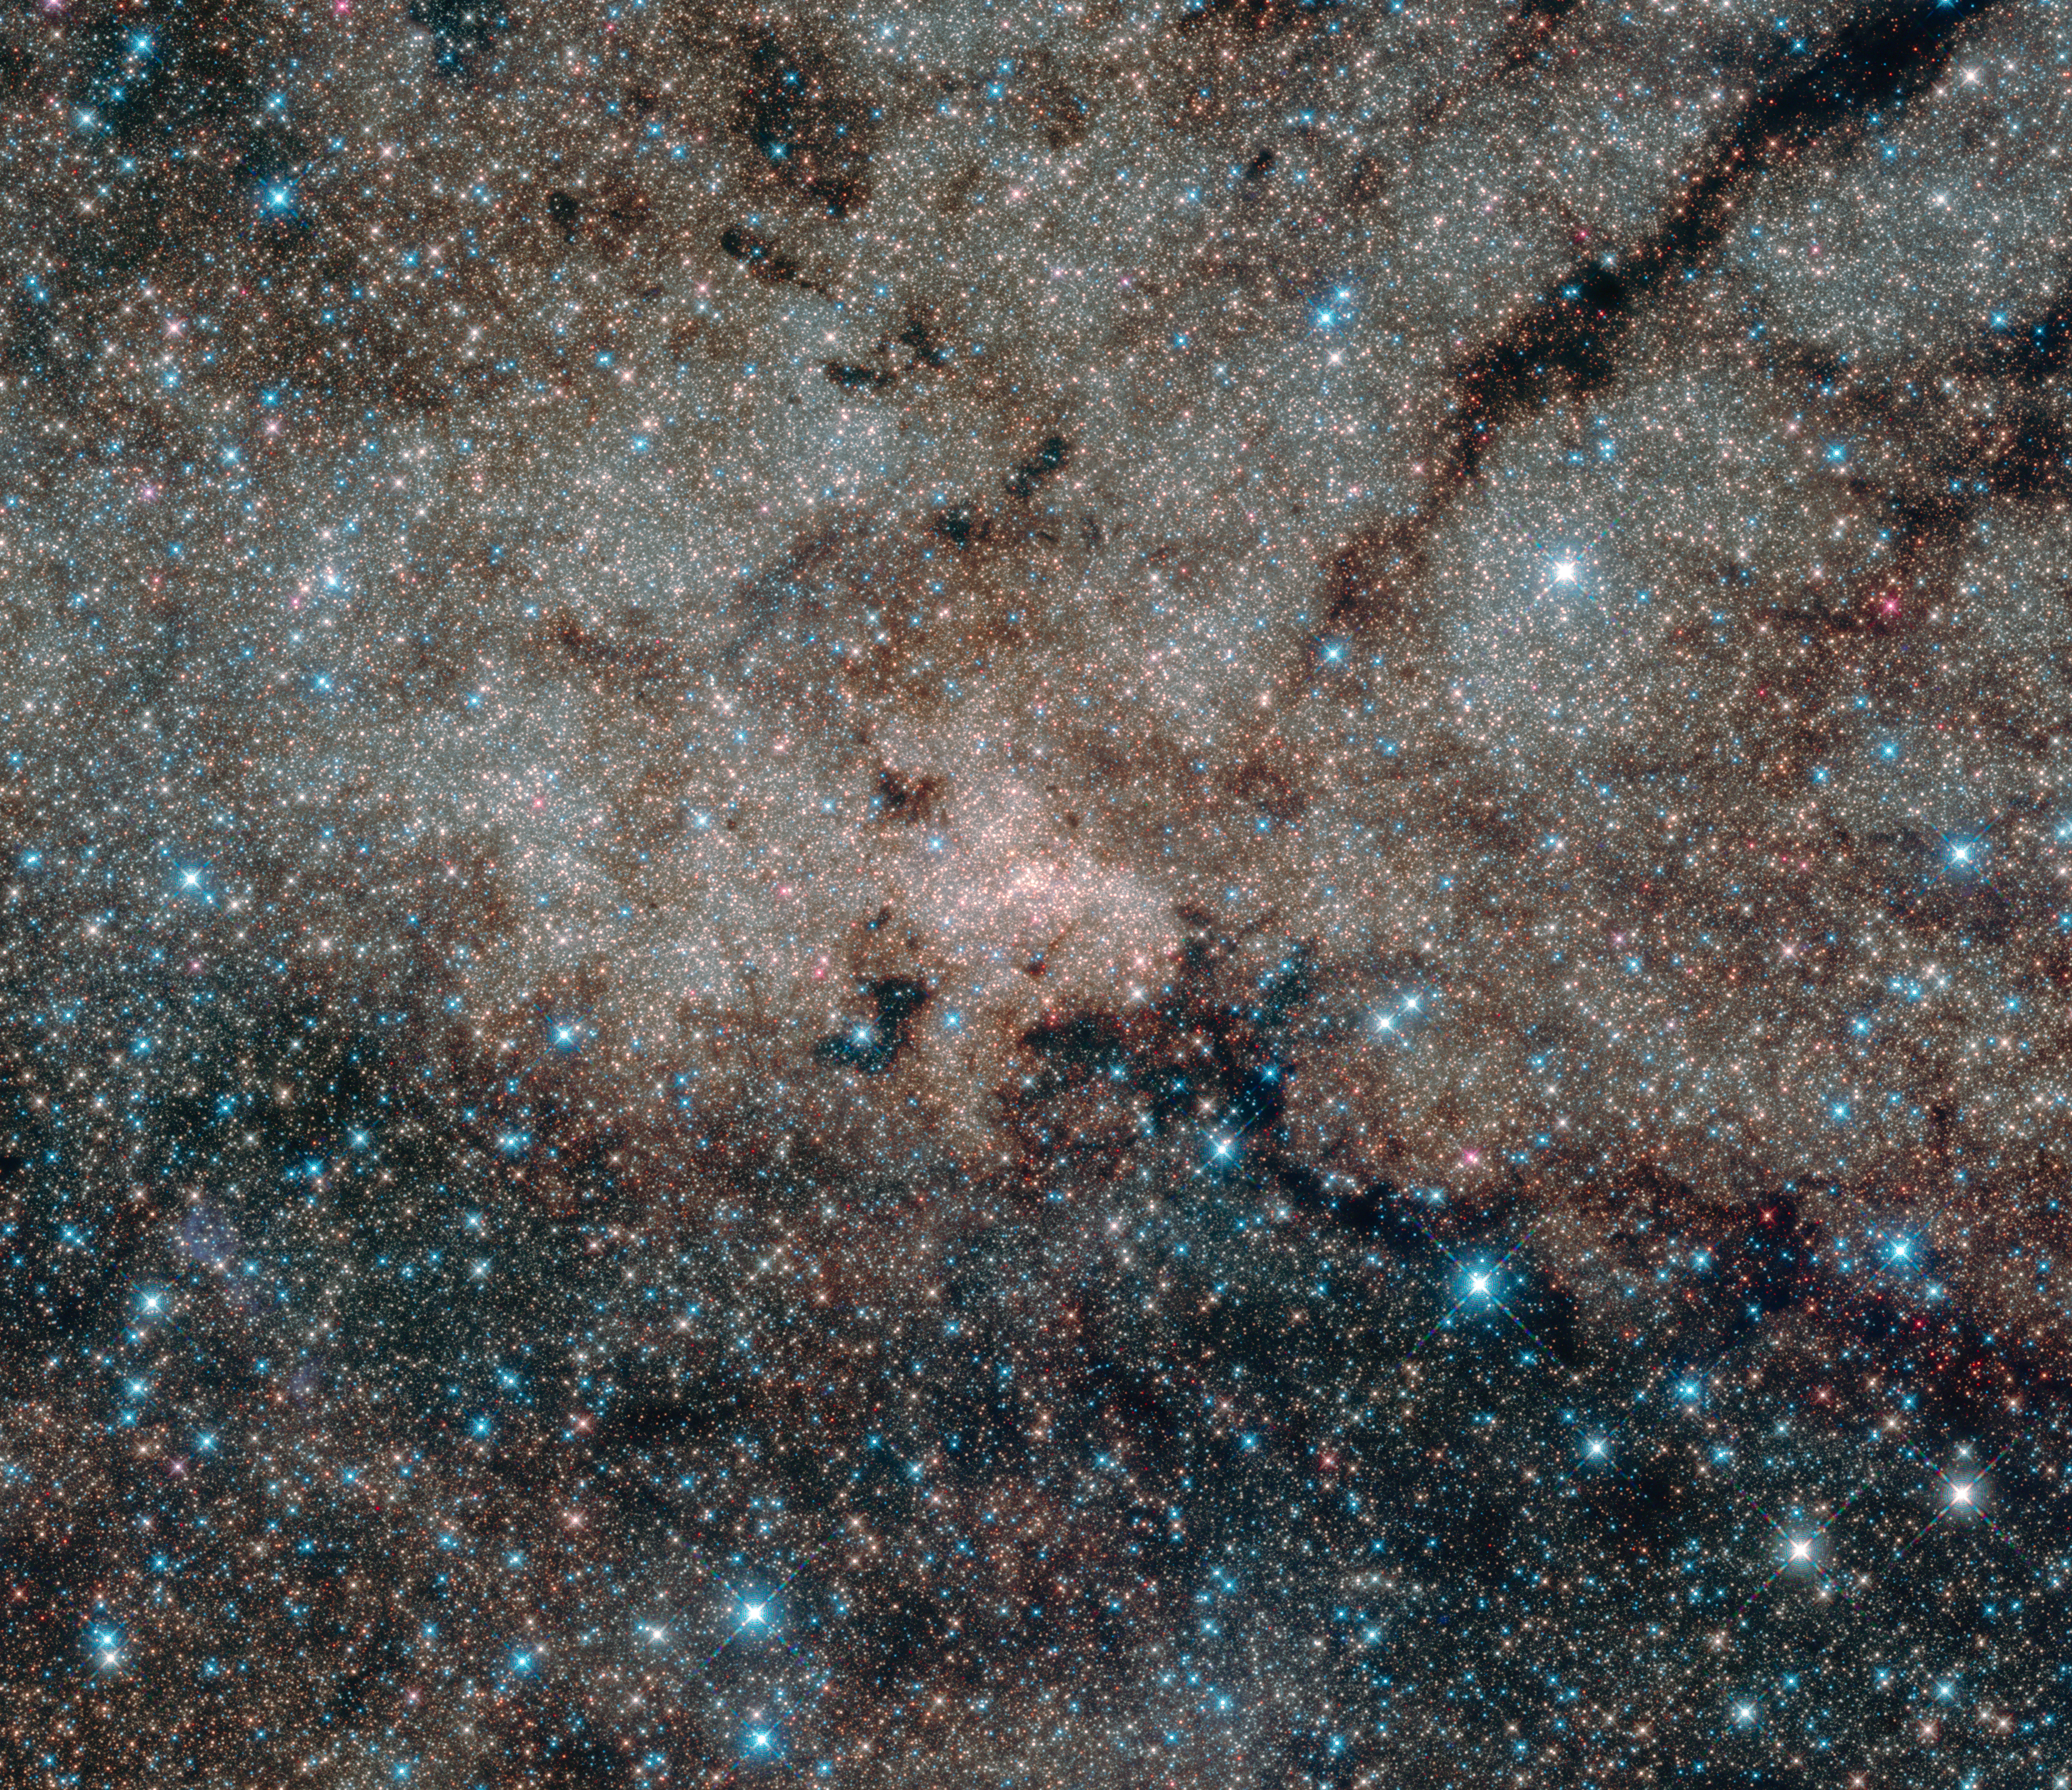

The galactic centre

This infrared image from the NASA/ESA Hubble Space Telescope shows the centre of the Milky Way, 27 000 light-years away from Earth. Using the infrared capabilities of Hubble, astronomers were able to peer through the dust which normally obscures the view of this interesting region. At the centre of this nuclear star cluster — and also in the centre of this image — the Milky Way’s supermassive black hole is located.

Credit: NASA, ESA, and the Hubble Heritage Team (STScI/AURA) Acknowledgment: NASA, ESA, T. Do and A. Ghez (UCLA), and V. Bajaj (STScI)